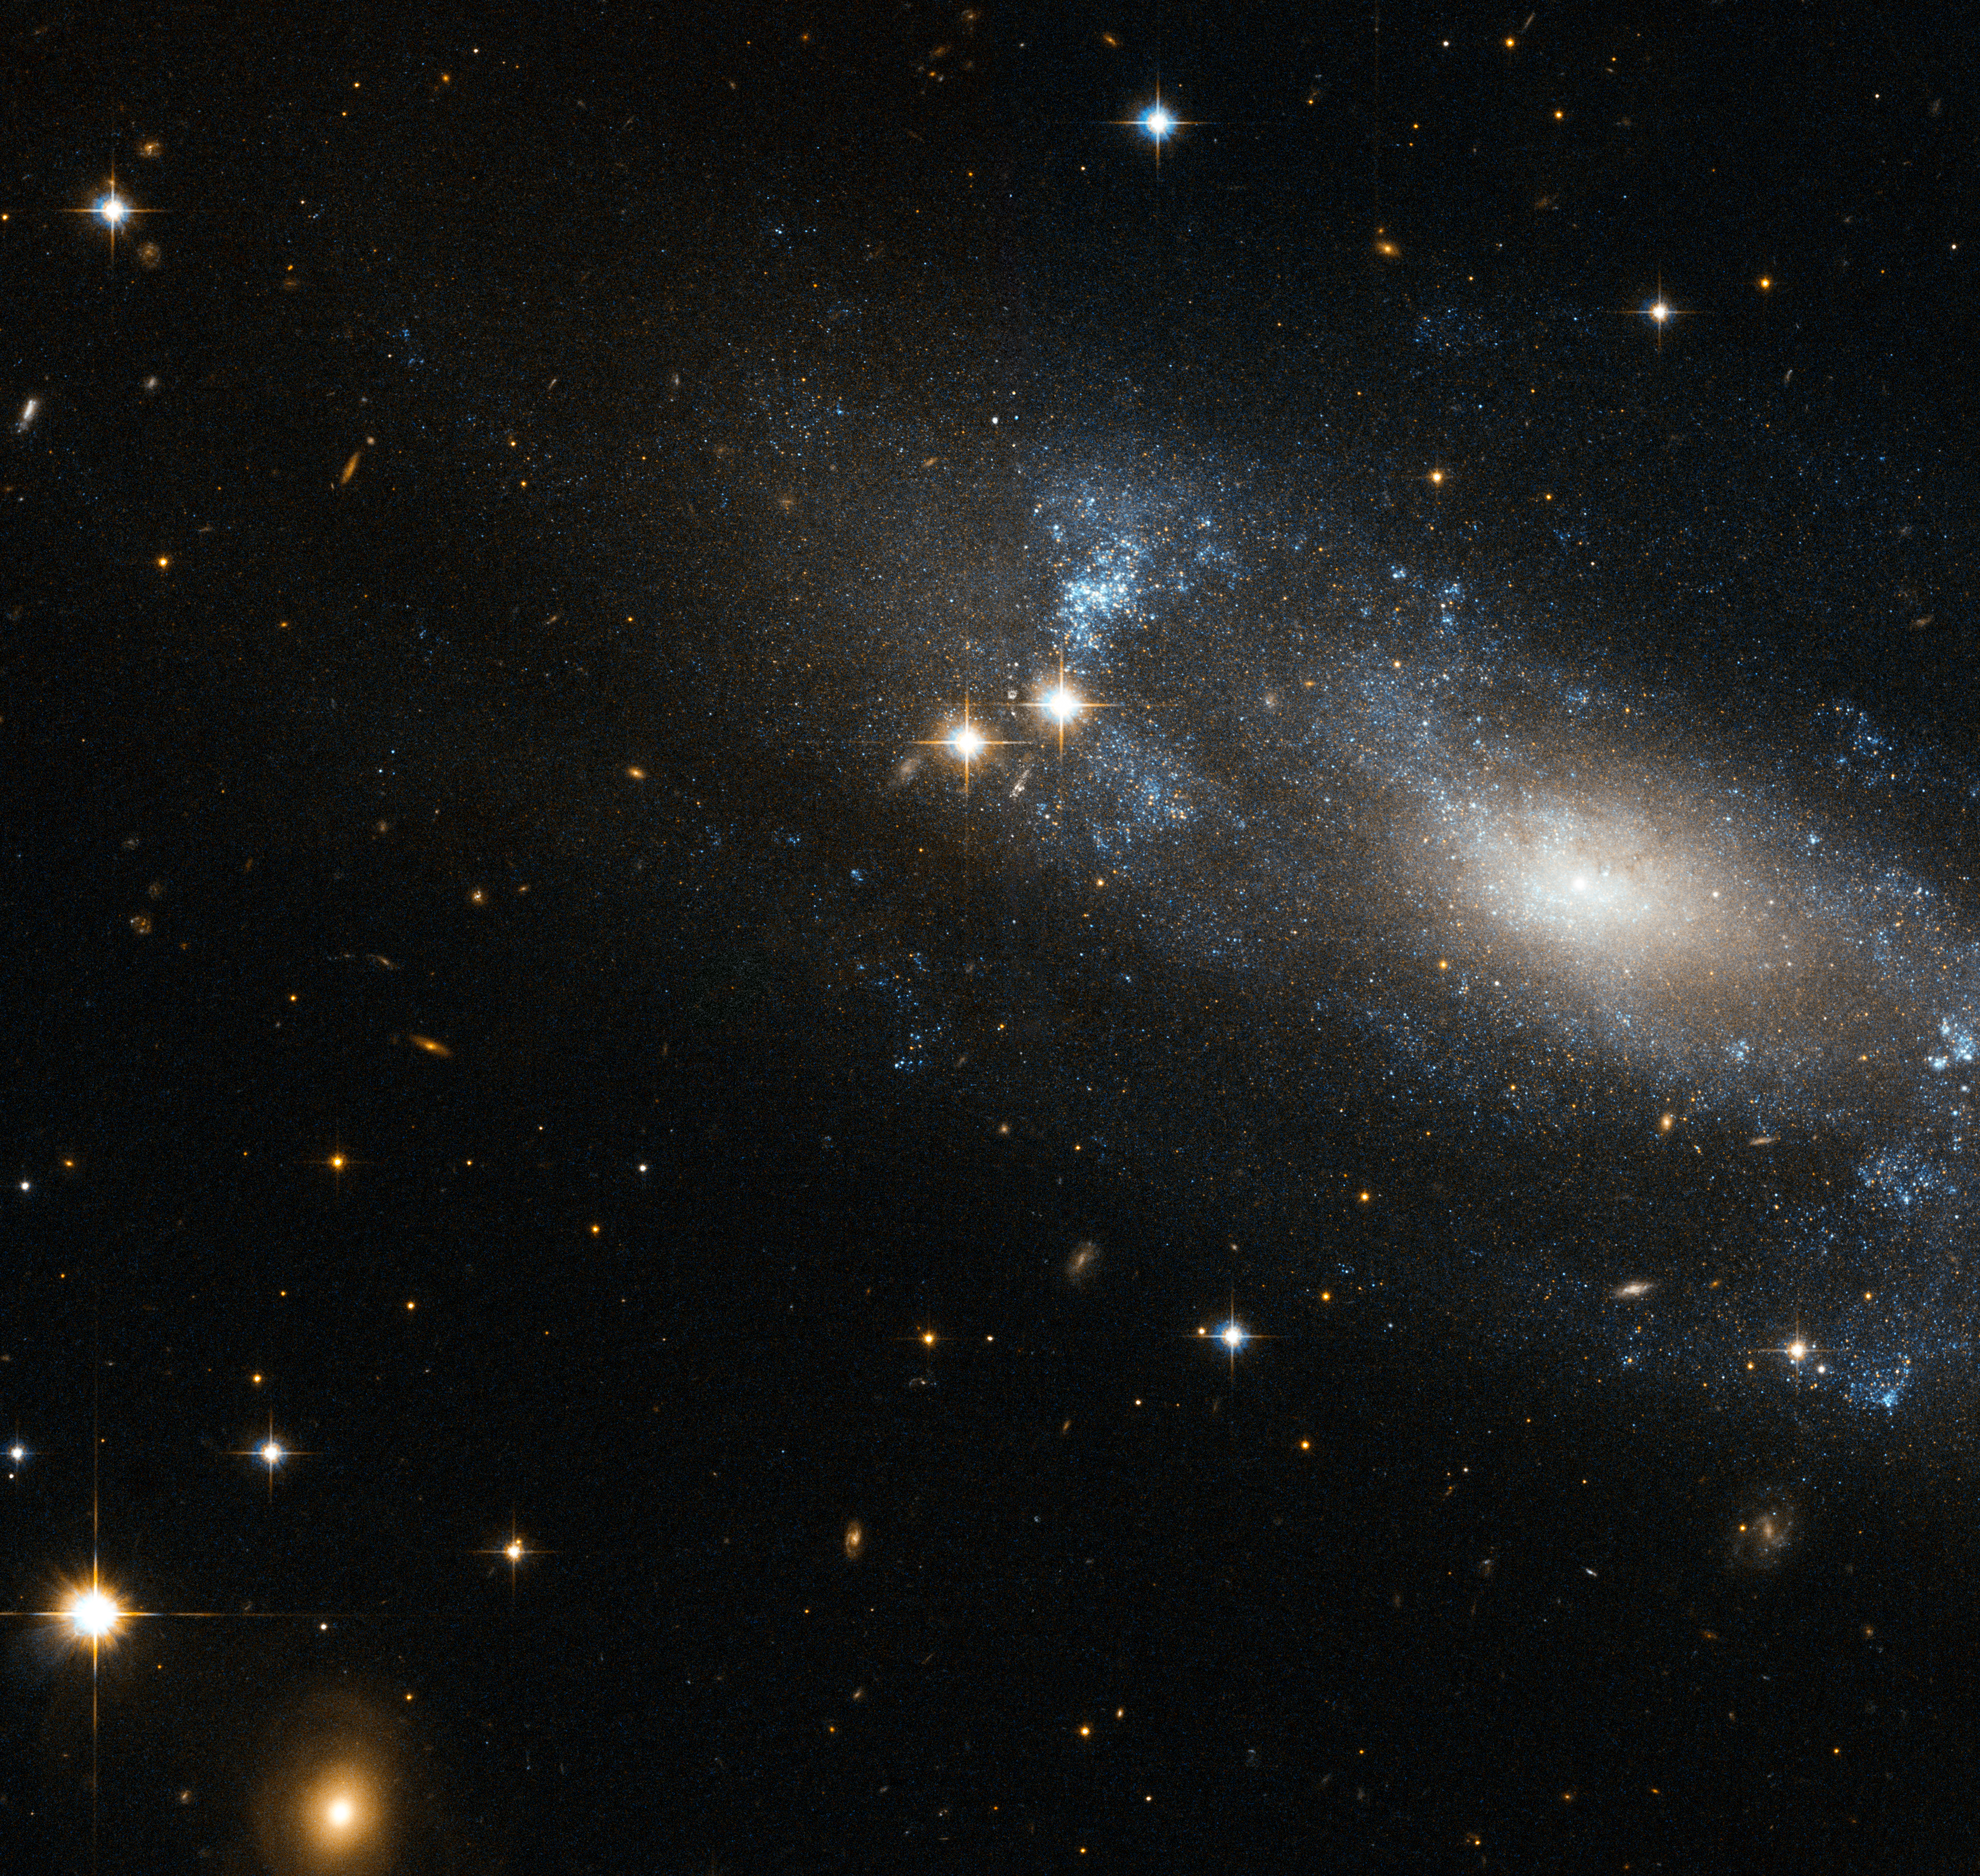

A loose spiral galaxy

The NASA/ESA Hubble Space Telescope has spotted the spiral galaxy ESO 499-G37, seen here against a backdrop of distant galaxies, scattered with nearby stars.

The galaxy is viewed from an angle, allowing Hubble to reveal its spiral nature clearly. The faint, loose spiral arms can be distinguished as bluish features swirling around the galaxy’s nucleus. This blue tinge emanates from the hot, young stars located in the spiral arms. The arms of a spiral galaxy have large amounts of gas and dust, and are often areas where new stars are constantly forming.

The galaxy’s most characteristic feature is a bright elongated nucleus. The bulging central core usually contains the highest density of stars in the galaxy, where typically a large group of comparatively cool old stars are packed in this compact, spheroidal region.

One feature common to many spiral galaxies is the presence of a bar running across the centre of the galaxy. These bars are thought to act as a mechanism that channels gas from the spiral arms to the centre, enhancing the star formation.

Recent studies suggest that ESO 499-G37’s nucleus sits within a small bar up to a few hundreds of light-years along, about a tenth the size of a typical galactic bar. Astronomers think that such small bars could be important in the formation of galactic bulges since they might provide a mechanism for bringing material from the outer regions down to the inner ones. However, the connection between bars and bulge formation is still not clear since bars are not a universal feature in spiral galaxies.

Lying in the constellation of Hydra, ESO 499-G37 is located about 59 million light-years away from the Sun. The galaxy belongs to the NGC 3175 group.

ESO 499-G37 was first observed in the late seventies within the ESO/Uppsala Survey of the ESO (B) atlas. This was a joint project undertaken by the European Southern Observatory (ESO) and the Uppsala Observatory, which used the ESO 1-metre Schmidt telescope at La Silla Observatory, Chile, to map a large portion of the southern sky looking for stars, galaxies, clusters, and planetary nebulae.

This picture was created from visible and infrared exposures taken with the Wide Field Channel of the Advanced Camera for Surveys. The field of view is approximately 3.4 arcminutes wide.

Credit: ESA/Hubble & NASA